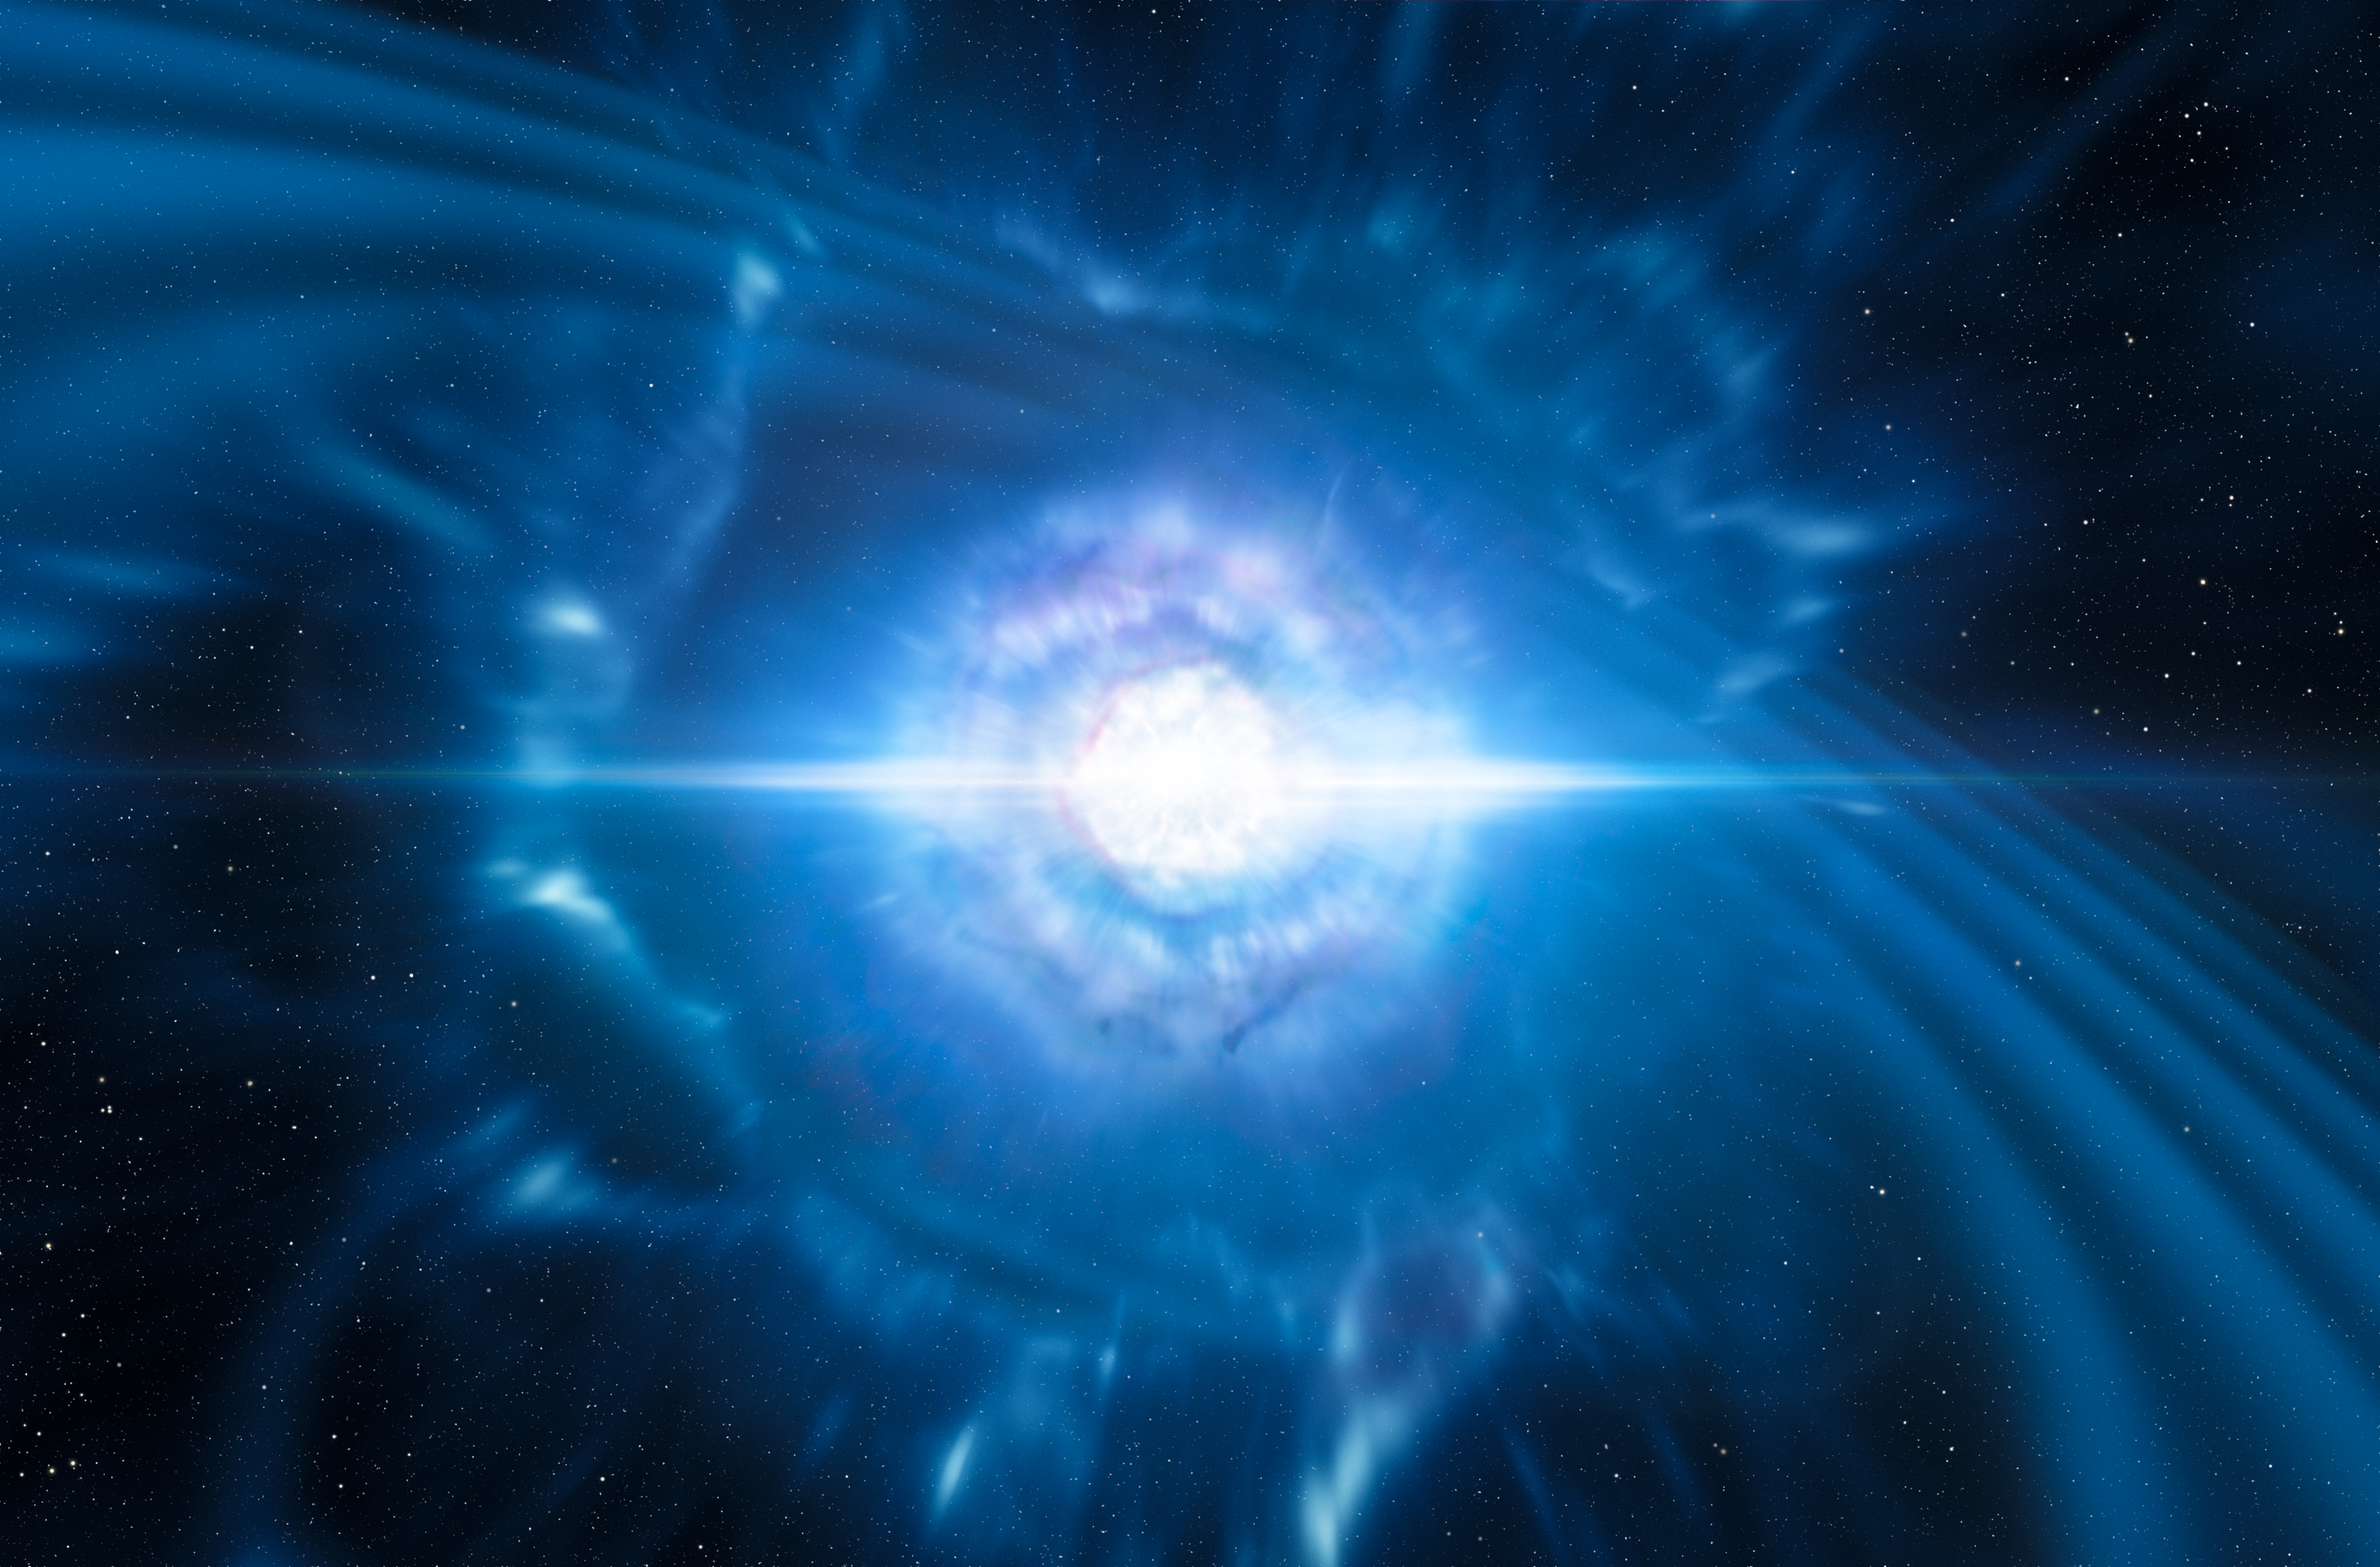

Artist’s impression of two neutron stars merging

This artist’s impression shows two tiny but very dense neutron stars at the point at which they merge and explode as a kilonova. Such a very rare event is expected to produce both gravitational waves and a short gamma-ray burst, both of which were observed on 17 August 2017 by the Laser Interferometer Gravitational-Wave Observatory (LIGO) and the Virgo Interferometer, and ESA’s INTEGRAL telescope and NASA’s Fermi Gamma-ray Space Telescope respectively. Subsequent detailed observations with telescopes all over the world, including the NASA/ESA Hubble Space Telescope, confirmed that this object, seen in the galaxy NGC 4993 about 130 million light-years from the Earth, is indeed a kilonova. Such objects are the main source of very heavy chemical elements, such as gold and platinum, in the Universe.

Credit: ESO/L. Calçada/M. Kornmesser